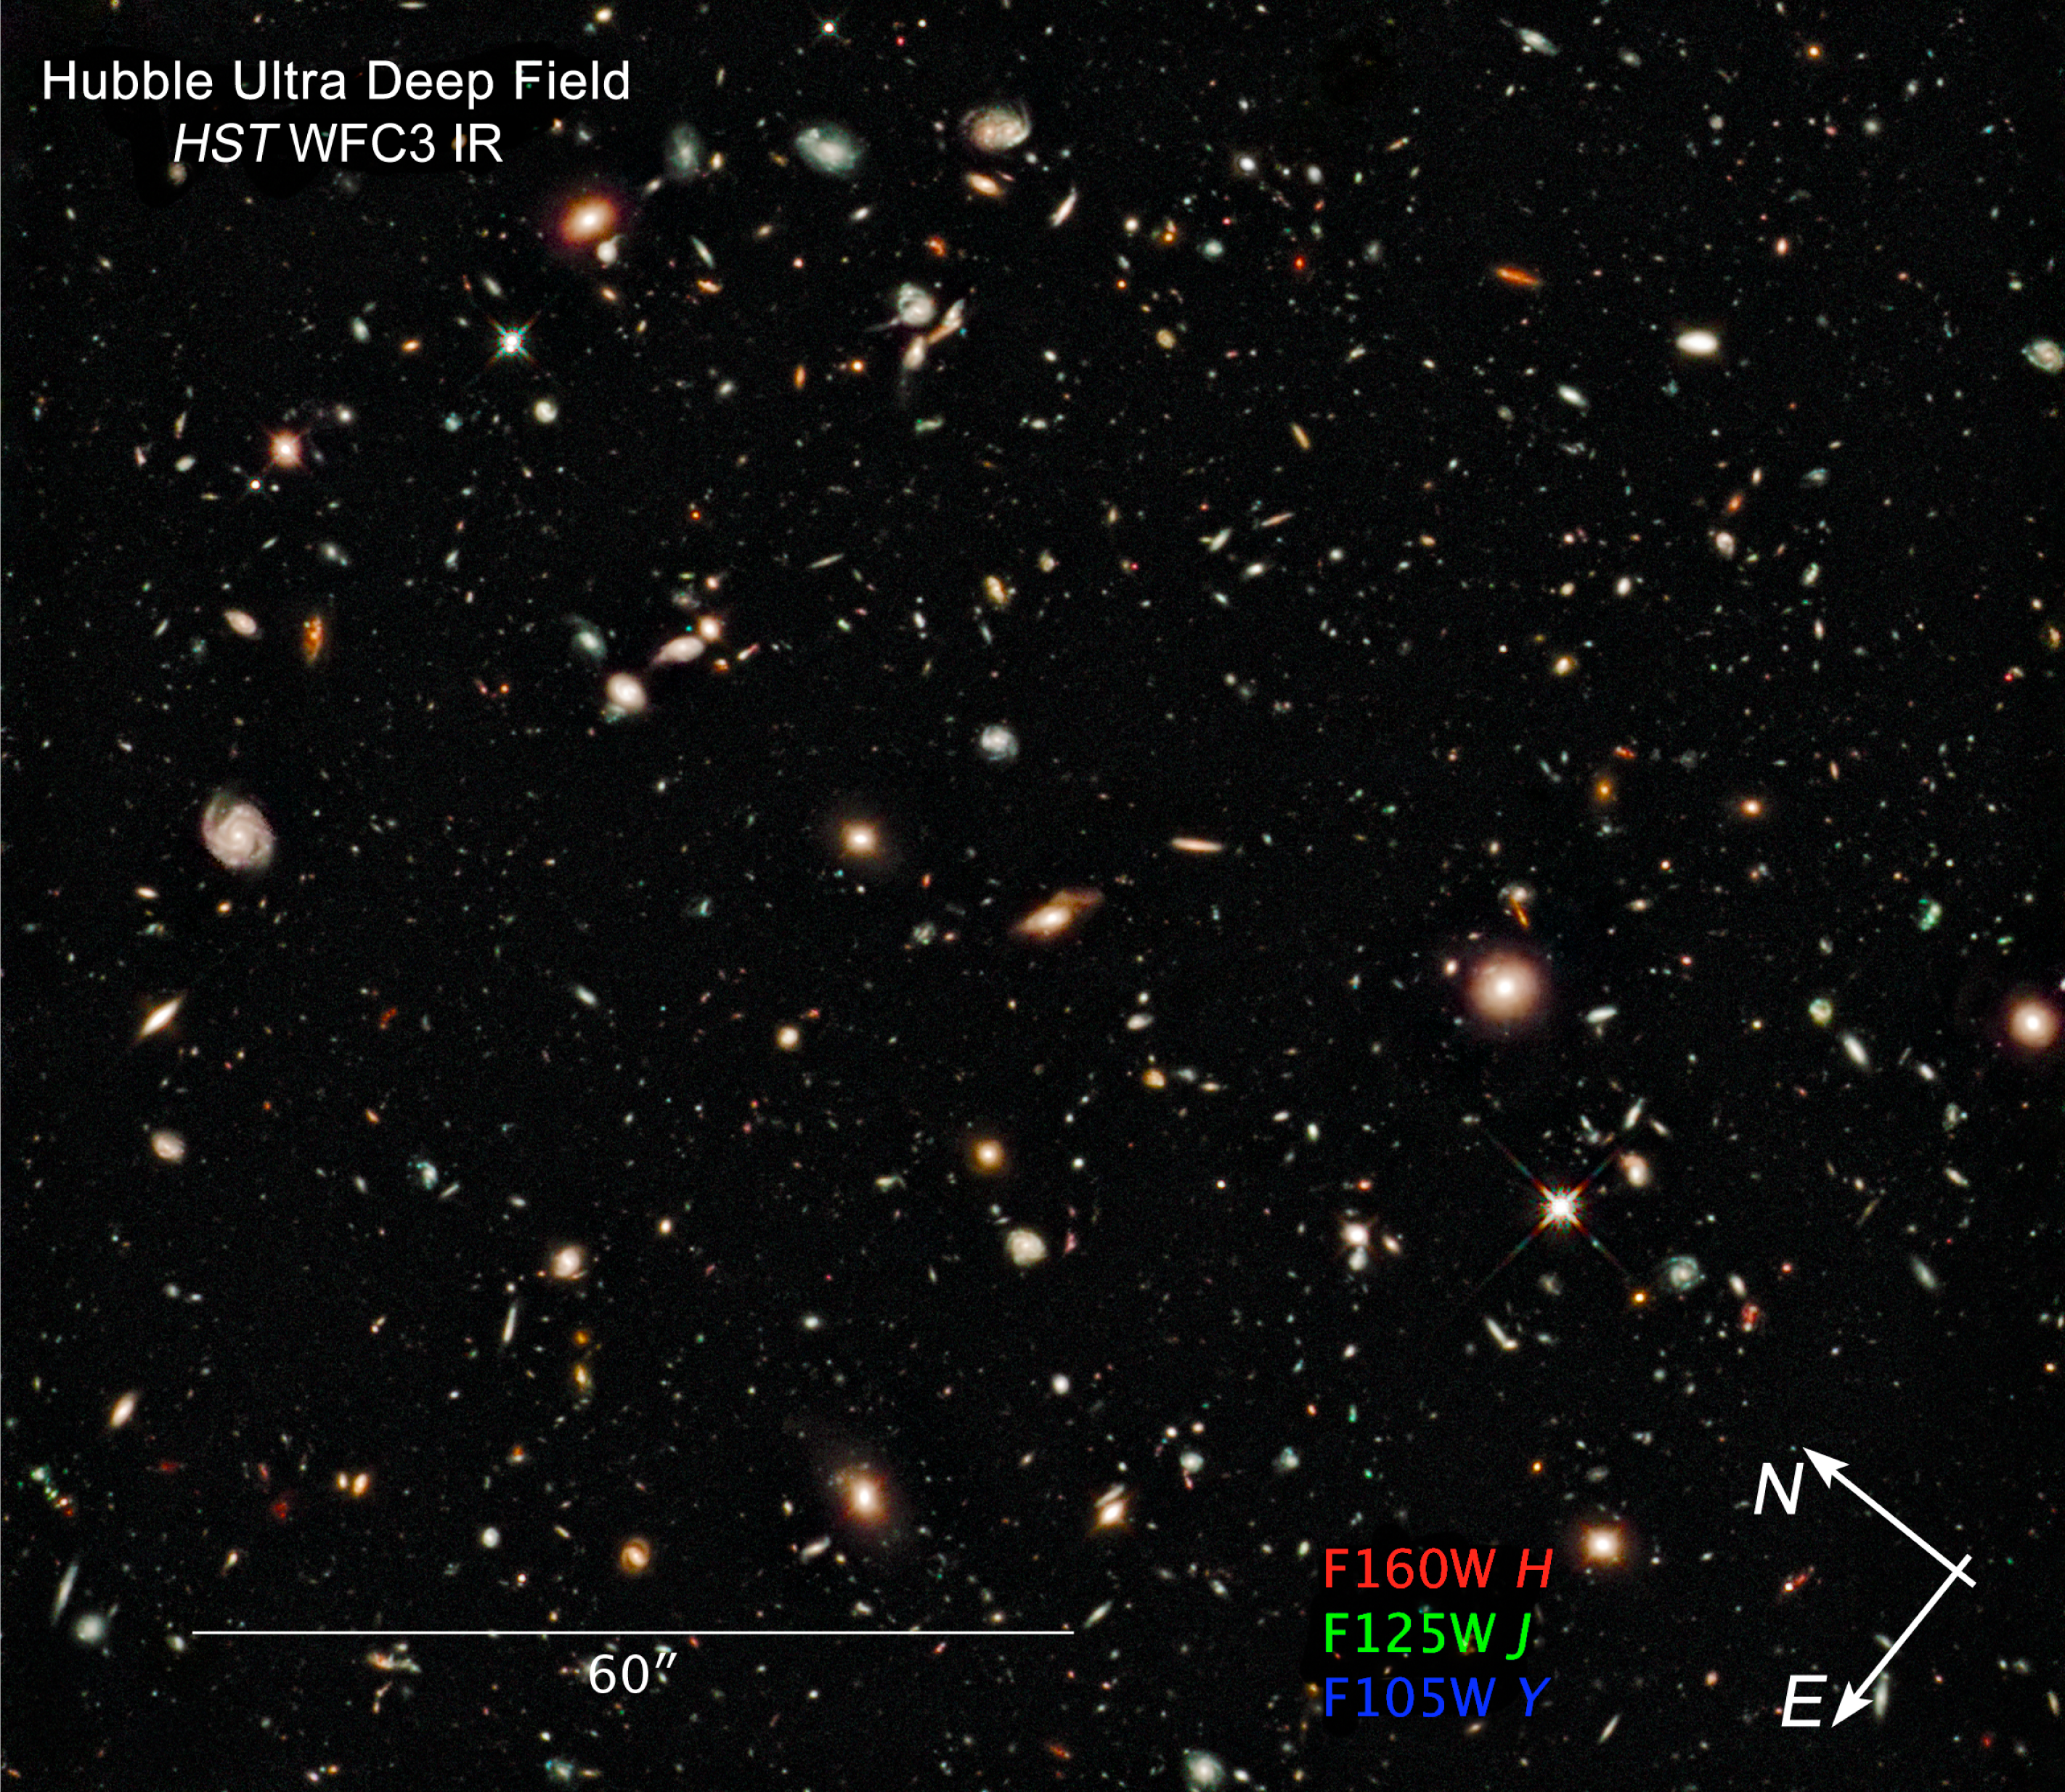

Compass and scale image of HUDF infrared

Compass and scale image of HUDF Infrared

Credit: NASA, ESA and Z. Levay (STScI)